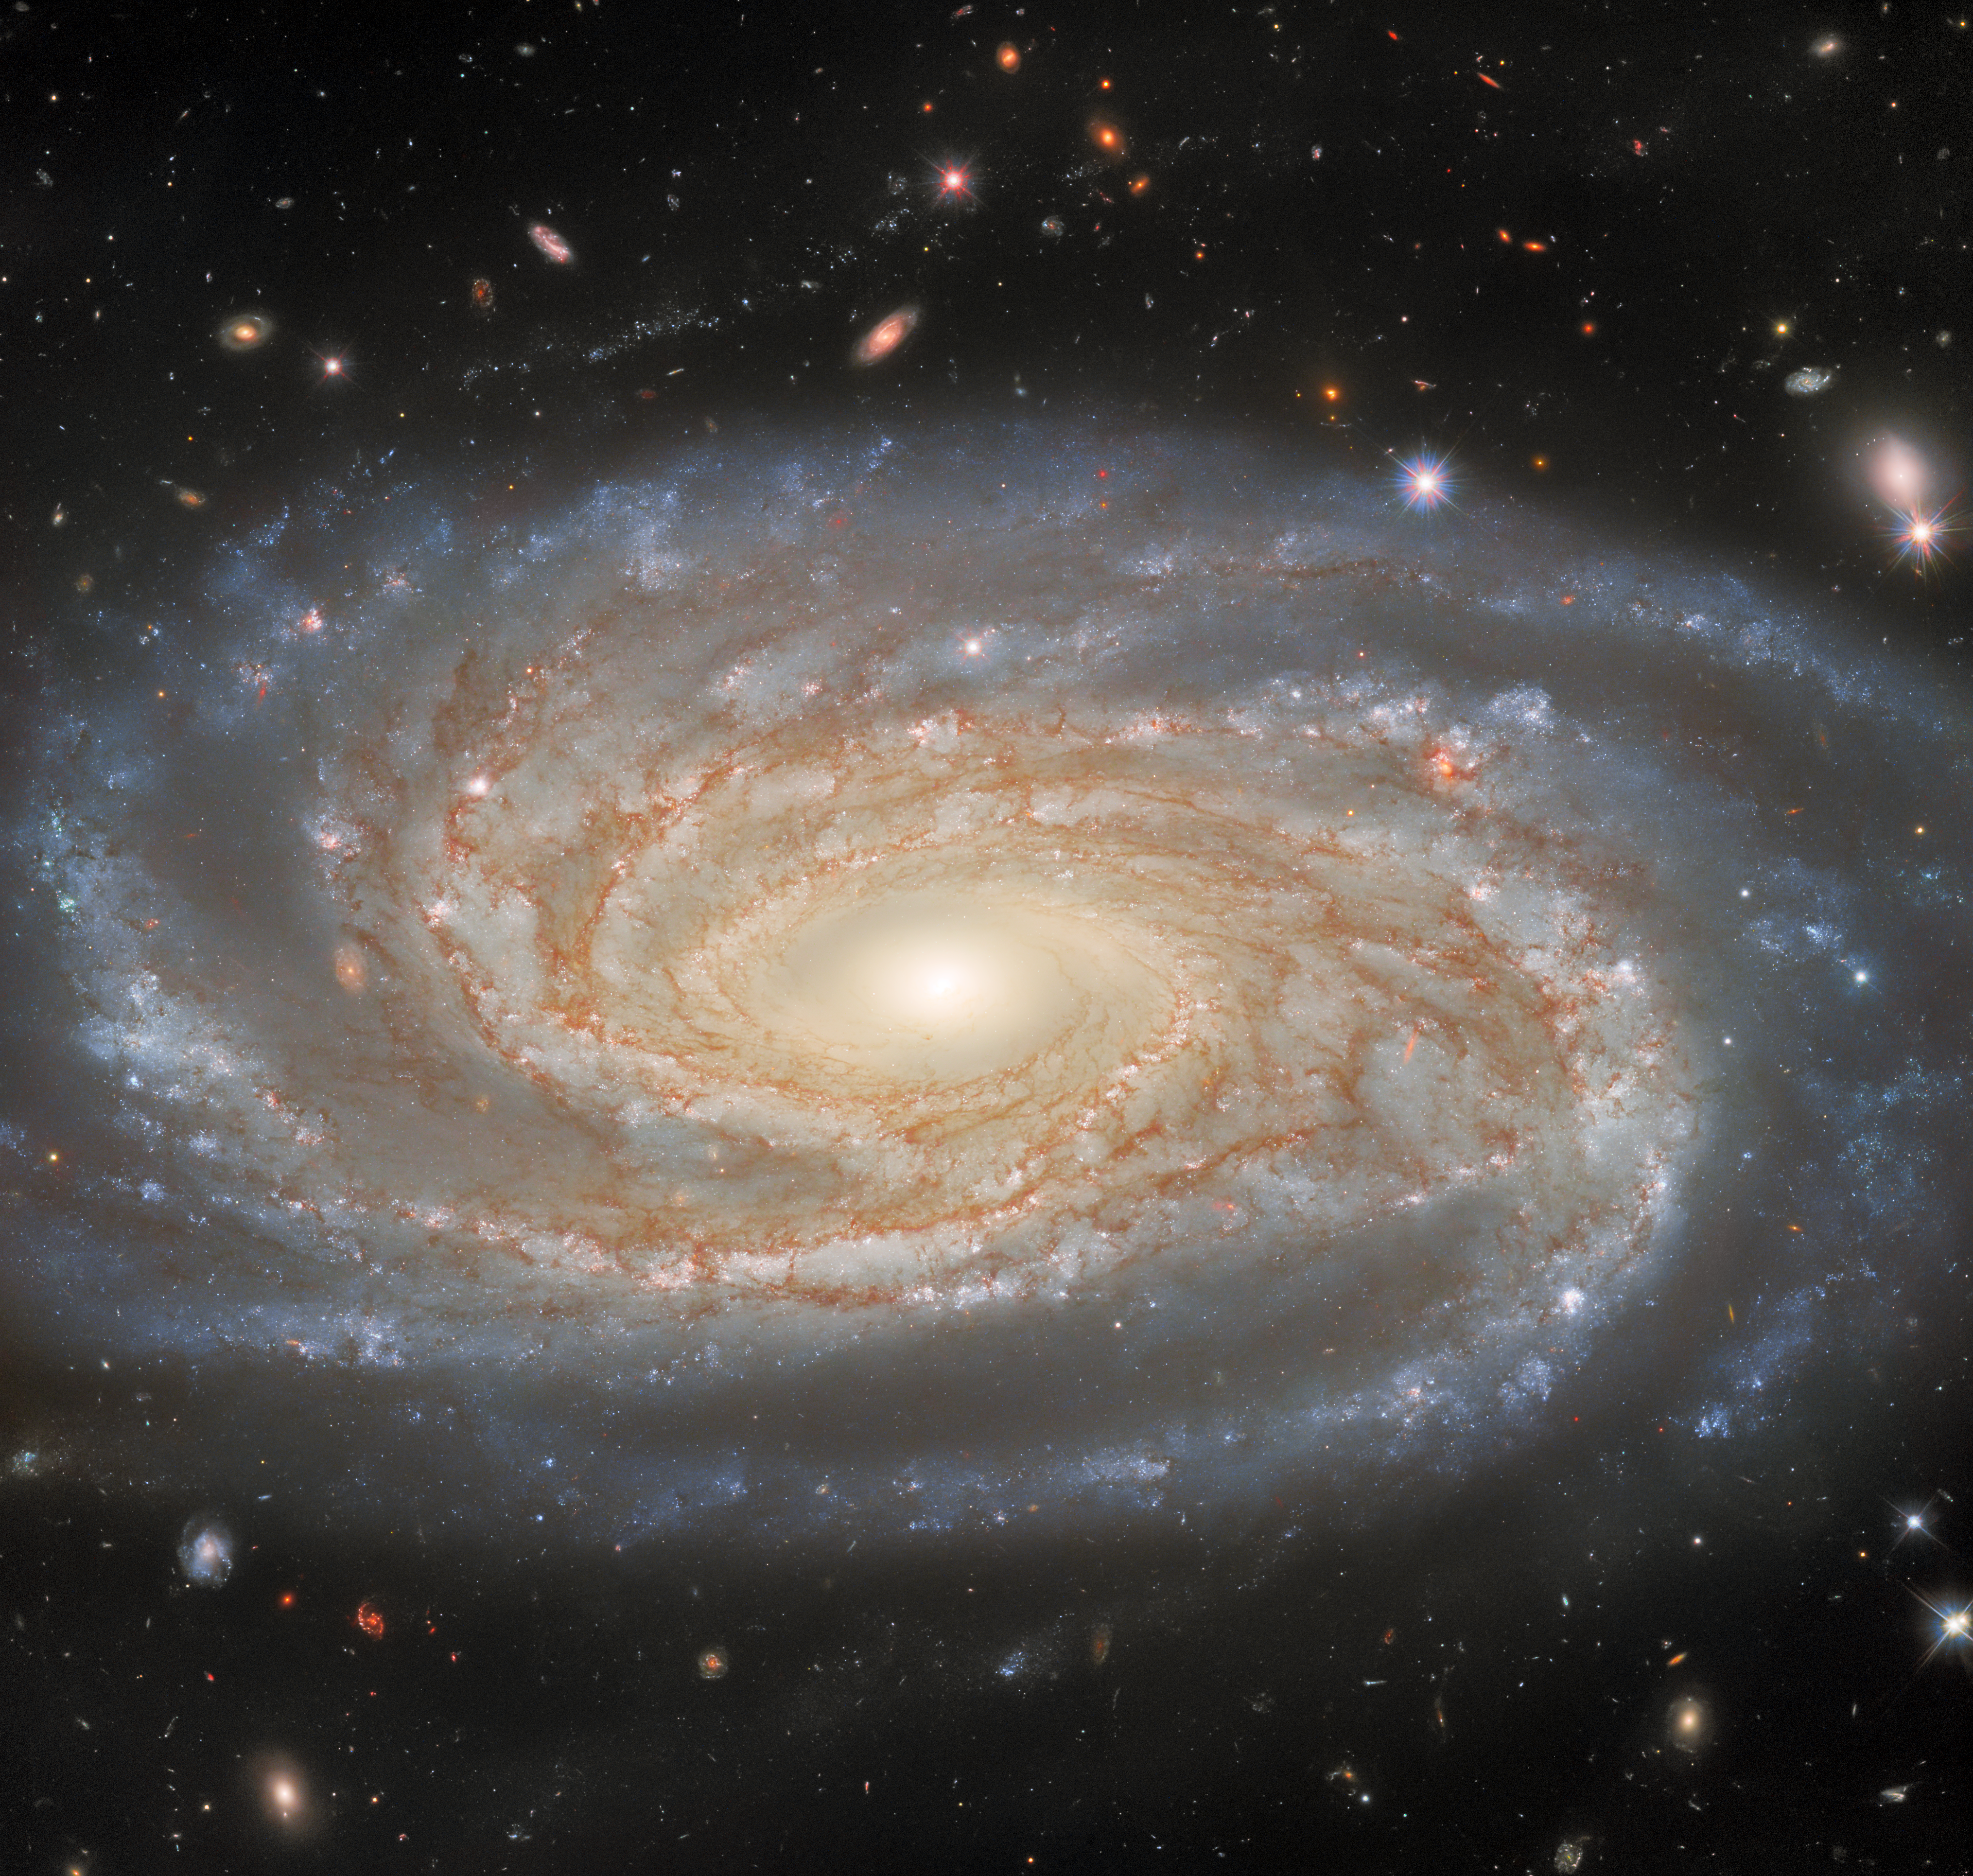

Investigating A Made-to-Measure Galaxy

The spiral arms of the galaxy NGC 7038 wind languidly across this image from the NASA/ESA Hubble Space Telescope. NGC 7038 lies around 220 million light-years from Earth in the southern constellation Indus. This image portrays an especially rich and detailed view of a spiral galaxy, and exposes a huge number of distant stars and galaxies around it. That’s because it’s made from a combined 15 hours worth of Hubble time focused on NGC 7038 and collecting light. So much data indicates that this is a valuable target, and indeed, NGC 7038 has been particularly helpful to astronomers measuring distances at vast cosmic scales.

The distances to astronomical objects are determined using an interconnected chain of measurement techniques called the Cosmic Distance Ladder. Each rung in the ladder is calibrated by earlier steps, based on measurements of objects closer to us. This makes the accuracy of distances at the largest scales dependent on how accurately distances to nearby objects can be determined. Hubble inspected NGC 7038 with its Wide Field Camera 3 to calibrate two of the most common distance measurement techniques: type 1A supernovae and Cepheid variables.

One of Hubble's original science goals was to accurately establish distances to night-sky objects, and over its three decades of operation Hubble’s increasingly precise distance measurements have contributed to one of the most intriguing unsolved problems in astronomy. Distance measurements are used to derive a quantity known as the Hubble constant, which captures how fast the Universe is expanding. As astronomer’s measurements of the Hubble constant have become more precise, their value has become increasingly inconsistent with the value of the Hubble Constant derived from observations of the Big Bang’s afterglow. Astronomers have been unable to explain the mismatch between the two values of the Hubble constant, which suggests that a new discovery in cosmology is waiting to be made.

Credit: ESA/Hubble & NASA, D. Jones Acknowledgement: G. Anand, L. Shatz